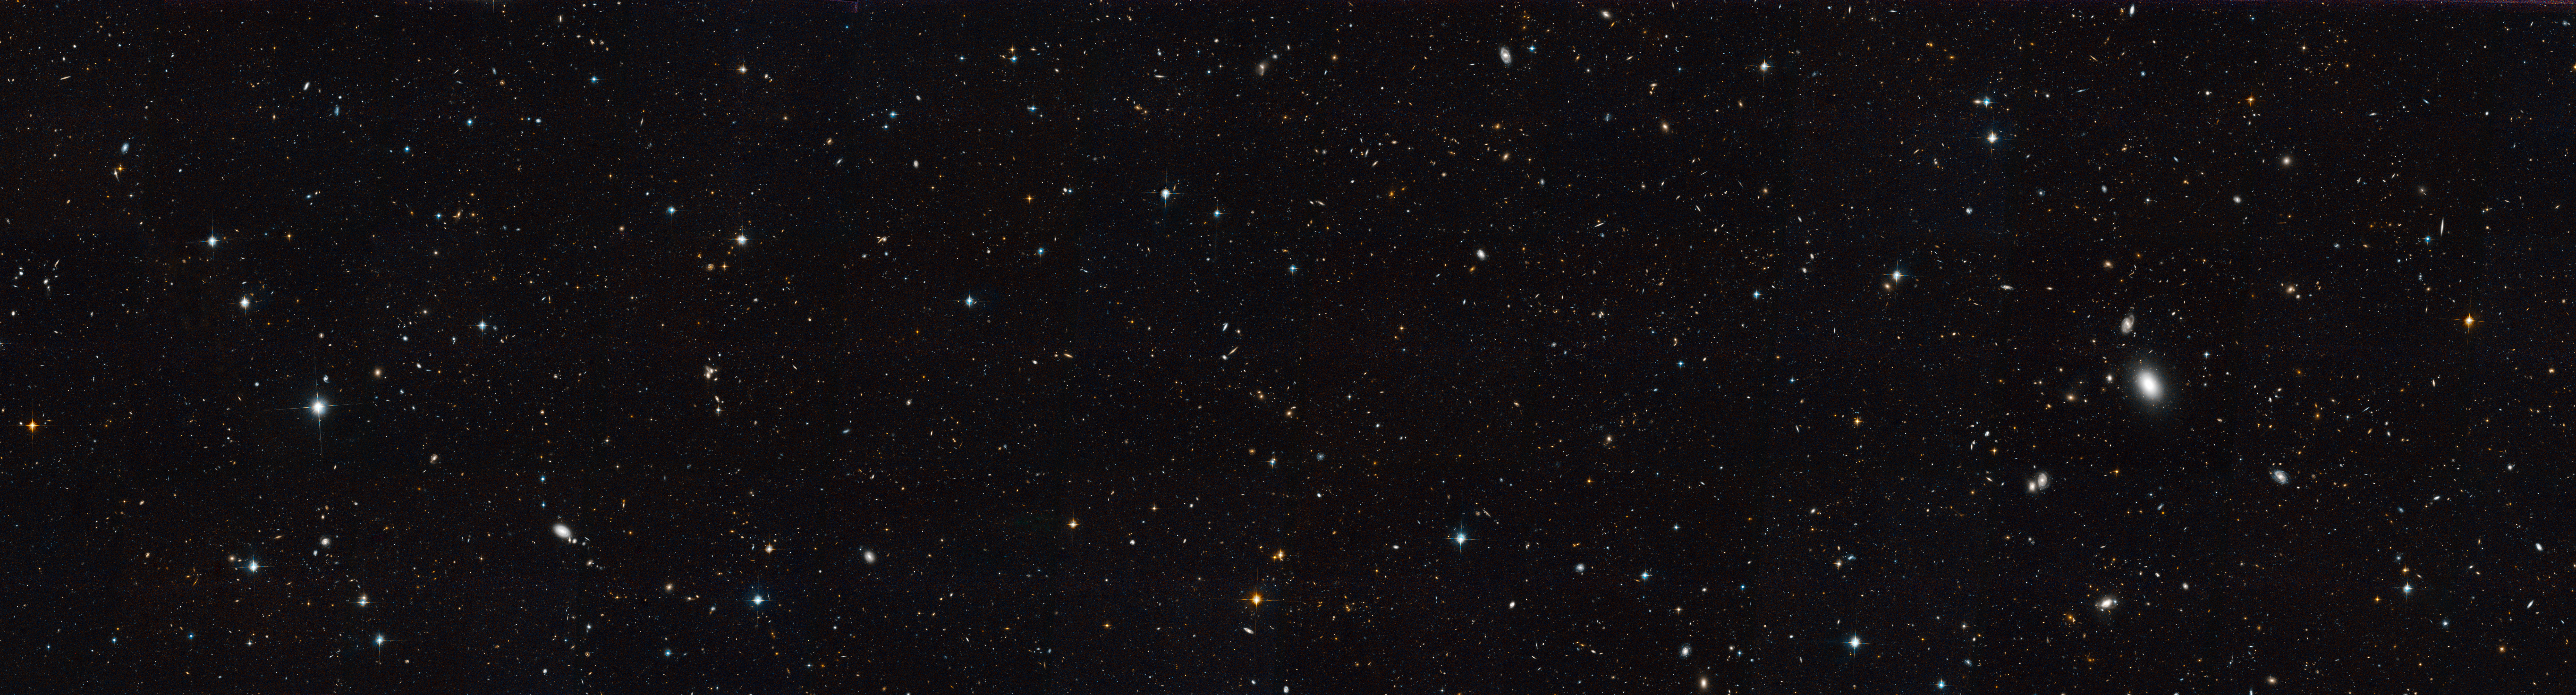

Extended Groth Strip

Extended Groth Strip.

Credit: NASA, ESA, M. Davis (University of California, Berkeley), and A. Koekemoer (STScI)